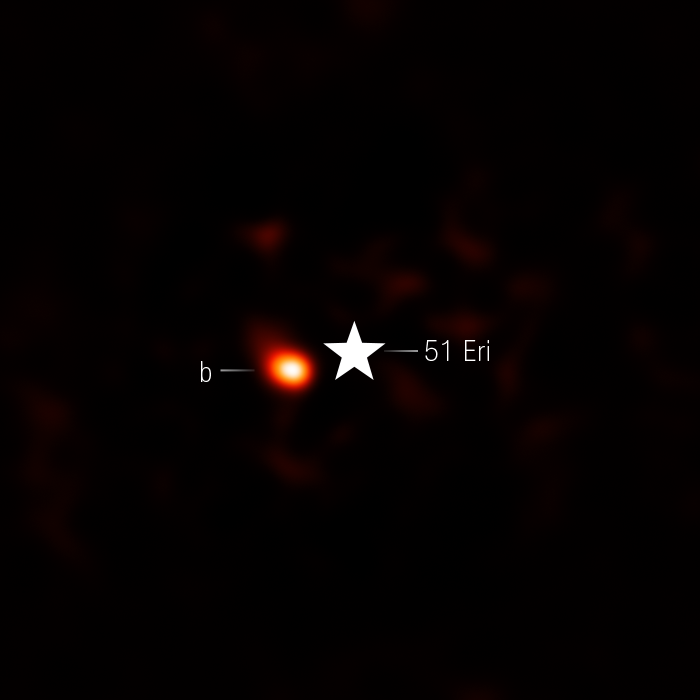

51 Eri b (NIRcam image)

The NASA/ESA/CSA James Webb Space Telescope’s NIRCam (Near-Infrared Camera) captured this image of Eridani 51 b, a cool, young exoplanet that orbits 17.7 billion kilometres from its star. Its distance is equivalent to a location between the orbits of Neptune and Saturn in our solar system. The observations detected the planet is rich in carbon dioxide, providing strong evidence that the planet formed much like Jupiter and Saturn, by slowly building a solid core that attracted gas from within a protoplanetary disk.

The 51 Eridani system is 96 light-years from Earth. This image includes filters representing 4.1-micron light as red.

Credit: NASA, ESA, CSA, STScI, W. Balmer (JHU), L. Pueyo (STScI), M. Perrin (STScI)